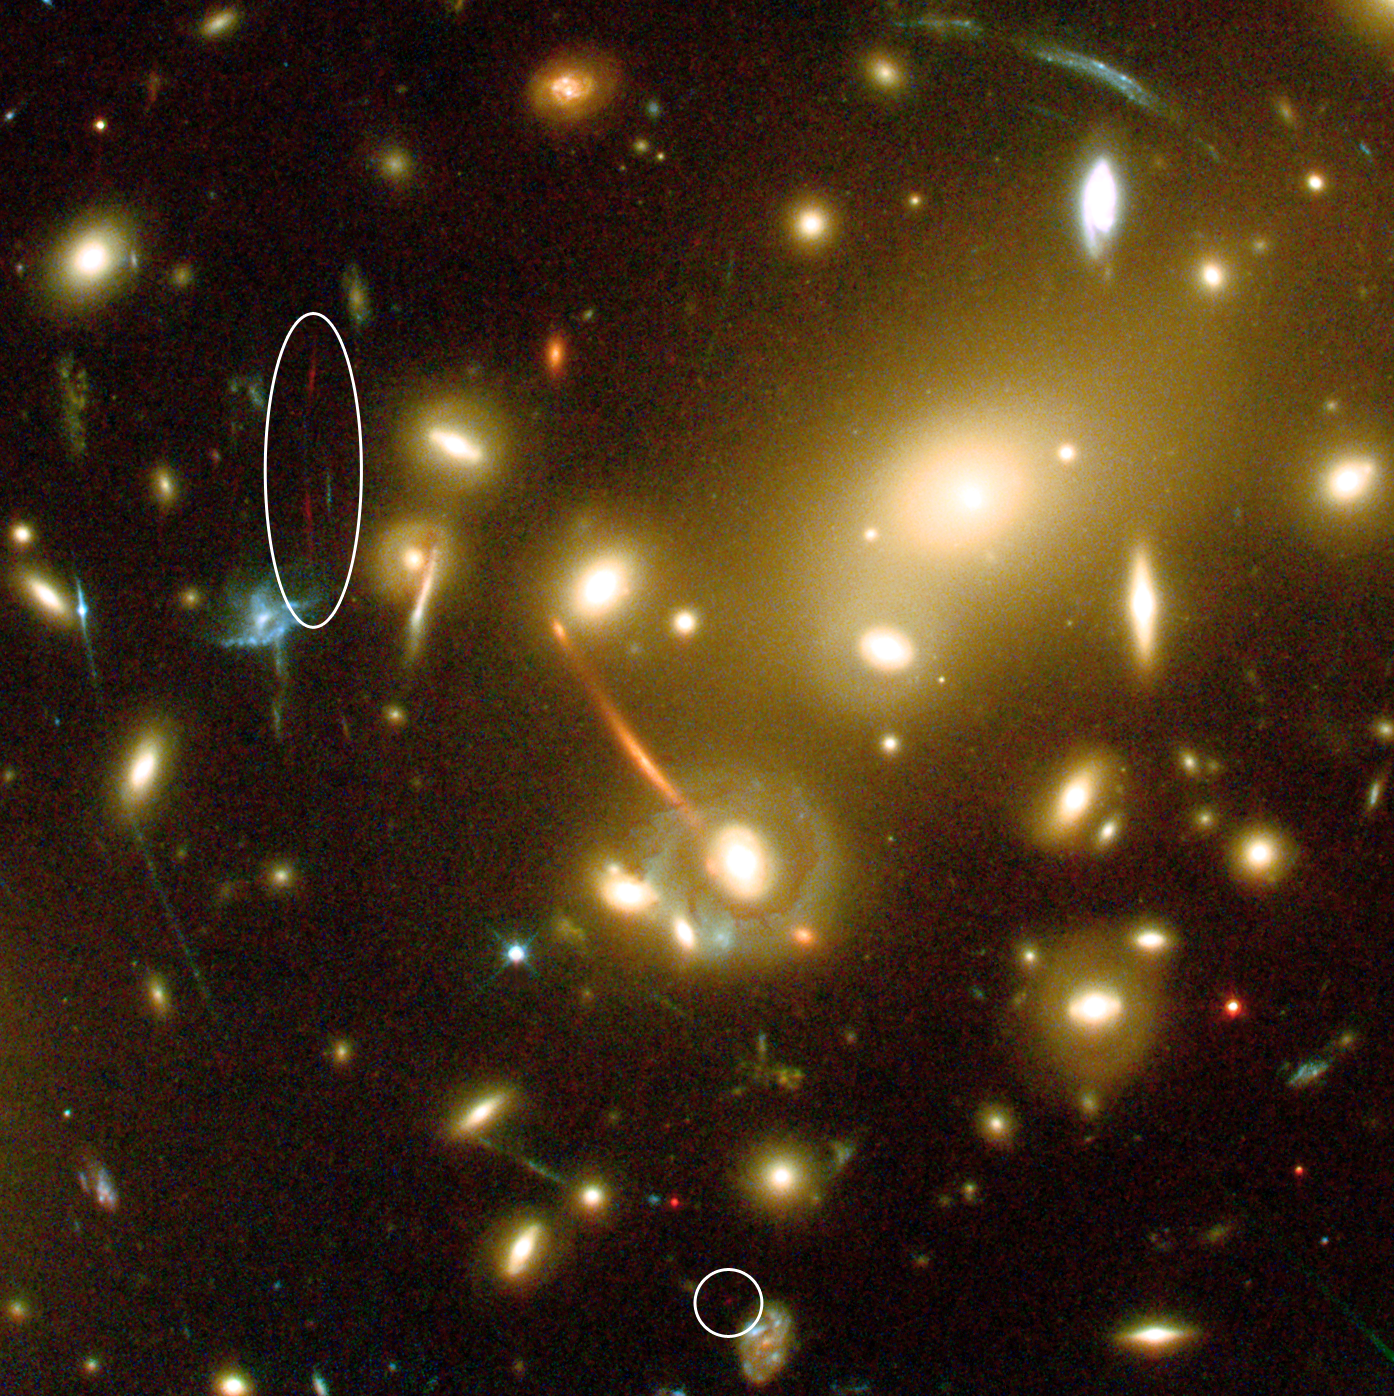

Hubble and Keck team up to find farthest known galaxy in the Universe

This close-up of the large galaxy cluster Abell 2218 shows how this cluster acts as one of nature's most powerful "gravitational telescopes" and amplifies and stretches all galaxies lying behind the cluster core (seen as red, orange and blue arcs). Such natural gravitational "telescopes" allow astronomers to see extremely distant and faint objects that could otherwise not be seen.

A new galaxy (split into two "images" marked with an ellipse and a circle) was detected in this image taken with the Advanced Camera for Surveys on board the NASA/ESA Hubble Space Telescope. The extremely faint galaxy is so far away that its visible light has been stretched into infrared wavelengths, making the observations particularly difficult.

The galaxy may have set a new record in being the most distant known galaxy in the Universe. Located an estimated 13 billion light-years away (z~7), the object is being viewed at a time only 750 million years after the big bang, when the Universe was barely 5 percent of its current age.

In the image the distant galaxy appears as multiple "images", an arc (left) and a dot (right), as its light is forced along different paths through the cluster's complex clumps of mass (the yellow galaxies) where the magnification is quite large.

The colour of the different lensed galaxies in the image is a function of their distances and galaxy types. The orange arc is for instance an elliptical galaxy at moderate redshift (z=0.7) and the blue arcs are star forming galaxies at intermediate redshift (z between 1 and 2.5).

Credit: European Space Agency, NASA, J.-P. Kneib (Observatoire Midi-Pyrénées) and R. Ellis (Caltech)